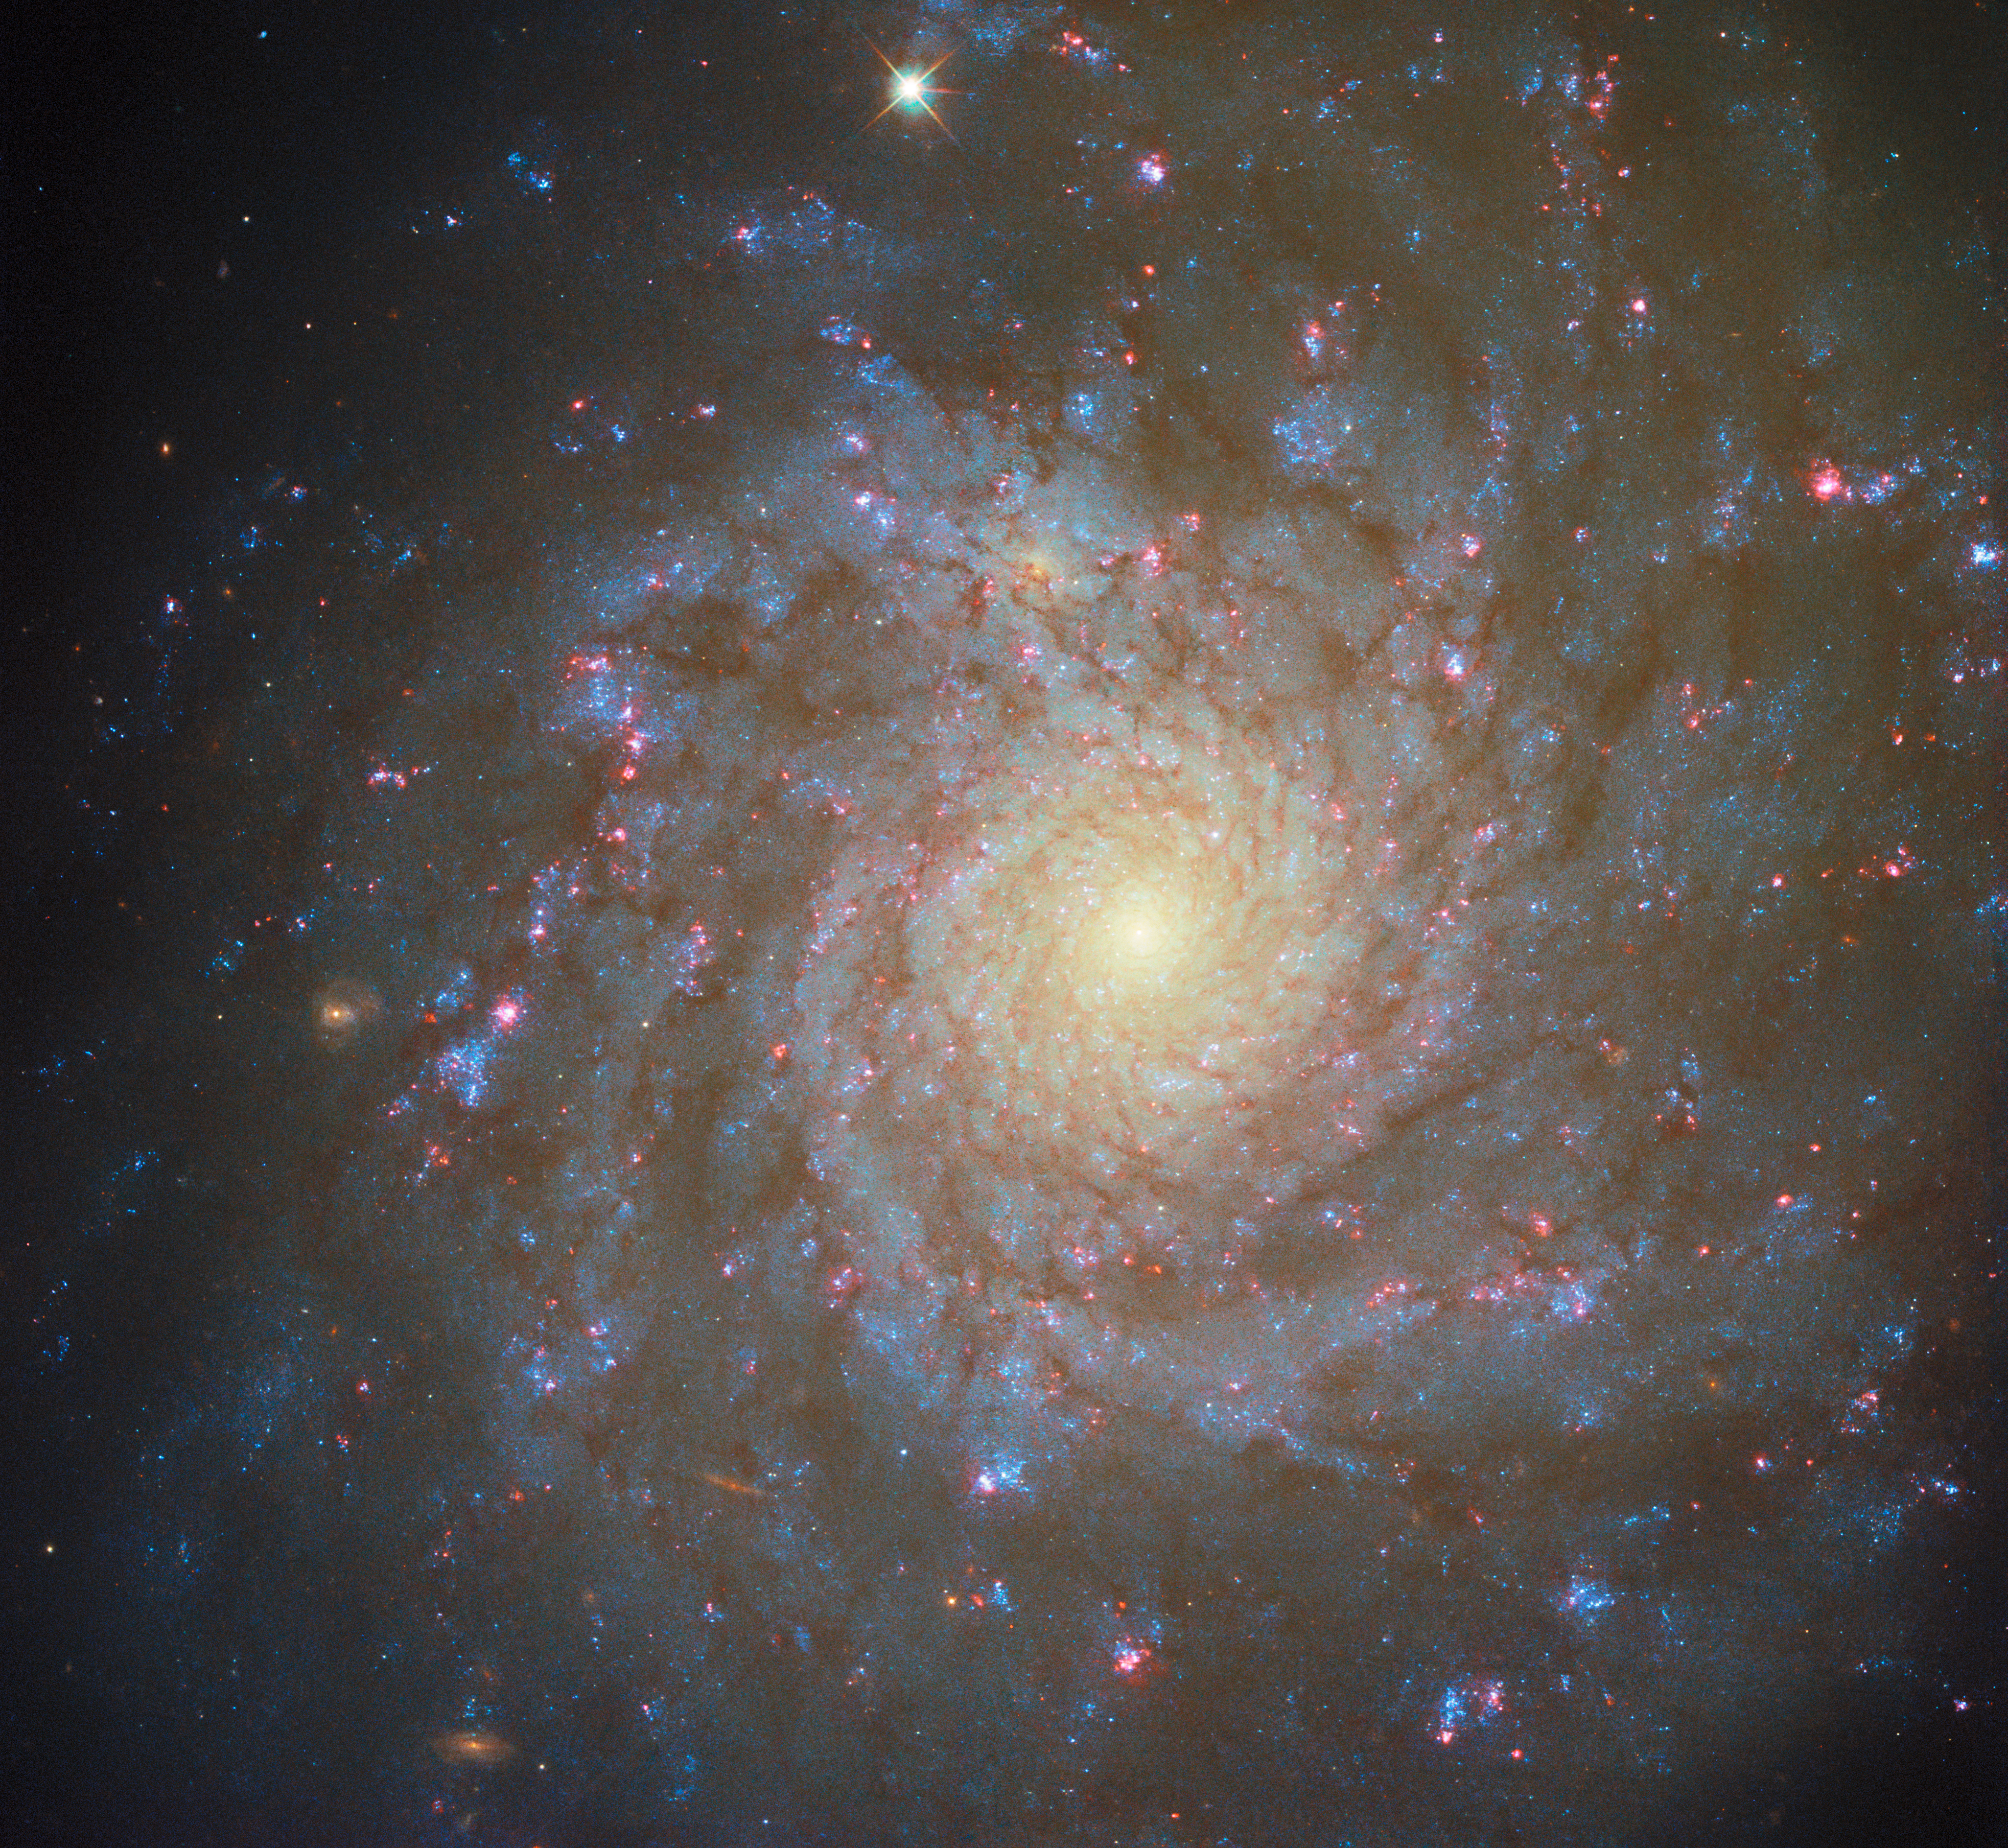

Spiralling star factory

A star-studded spiral galaxy shines in this NASA/ESA Hubble Space Telescope Picture of the Week. This galaxy is called NGC 4571, and it’s situated about 60 million light-years away in the constellation Coma Berenices. NGC 4571 dominates the scene with its feathery spiral structure and sparkling star clusters.

The galaxy’s dusty spiral arms are dotted with brilliant pink nebulae that contain massive young stars. Though the star-forming clouds that are seen here are heated to roughly 10 000 degrees by searing ultraviolet light from the young stars at their cores, stars get their start in much chillier environments. The sites of star birth are giant molecular clouds tens to hundreds of light-years across, in which the temperature hovers just a few tens of degrees above absolute zero.

The dramatic transformation from freezing gas cloud to fiery young star happens thanks to the immense pull of gravity, which collects gas into dense clumps within a star-forming cloud. As these clumps yield to gravity’s pull and collapse inward, they eventually become hot and dense enough to spark nuclear fusion in their centres and begin to shine. The glowing clouds in this image surround particularly massive stars that are hot enough to ionise the gas of their birthplaces.

A Hubble image of NGC 4571 was previously released in 2022, using data from an observing programme the combines data from leading observatories like Hubble, the NASA/ESA/CSA James Webb Space Telescope, and the Atacama Large Millimeter/submillimeter Array to study star formation in nearby spiral galaxies like NGC 4571. The new image released today adds data from a programme that seeks to understand how dust affects our observations of young stars deeply embedded within their natal clouds.

Credit: ESA/Hubble & NASA, F. Belfiore, J. Lee and the PHANGS-HST Team